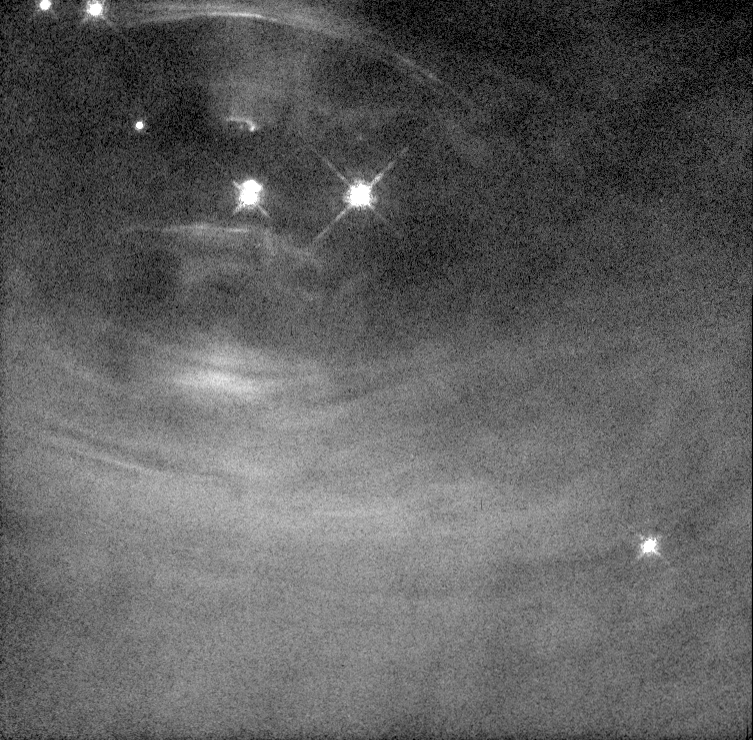

Changes in the Inner Crab Nebula

Scientists are learning more about how pulsars work by studying a series of Hubble Space Telescope images of the heart of the Crab Nebula. The images, taken over a period of several months, show that the Crab is a far more dynamic object than previously understood.

Credit: Jeff Hester and Paul Scowen (Arizona State University), and NASA/ESA